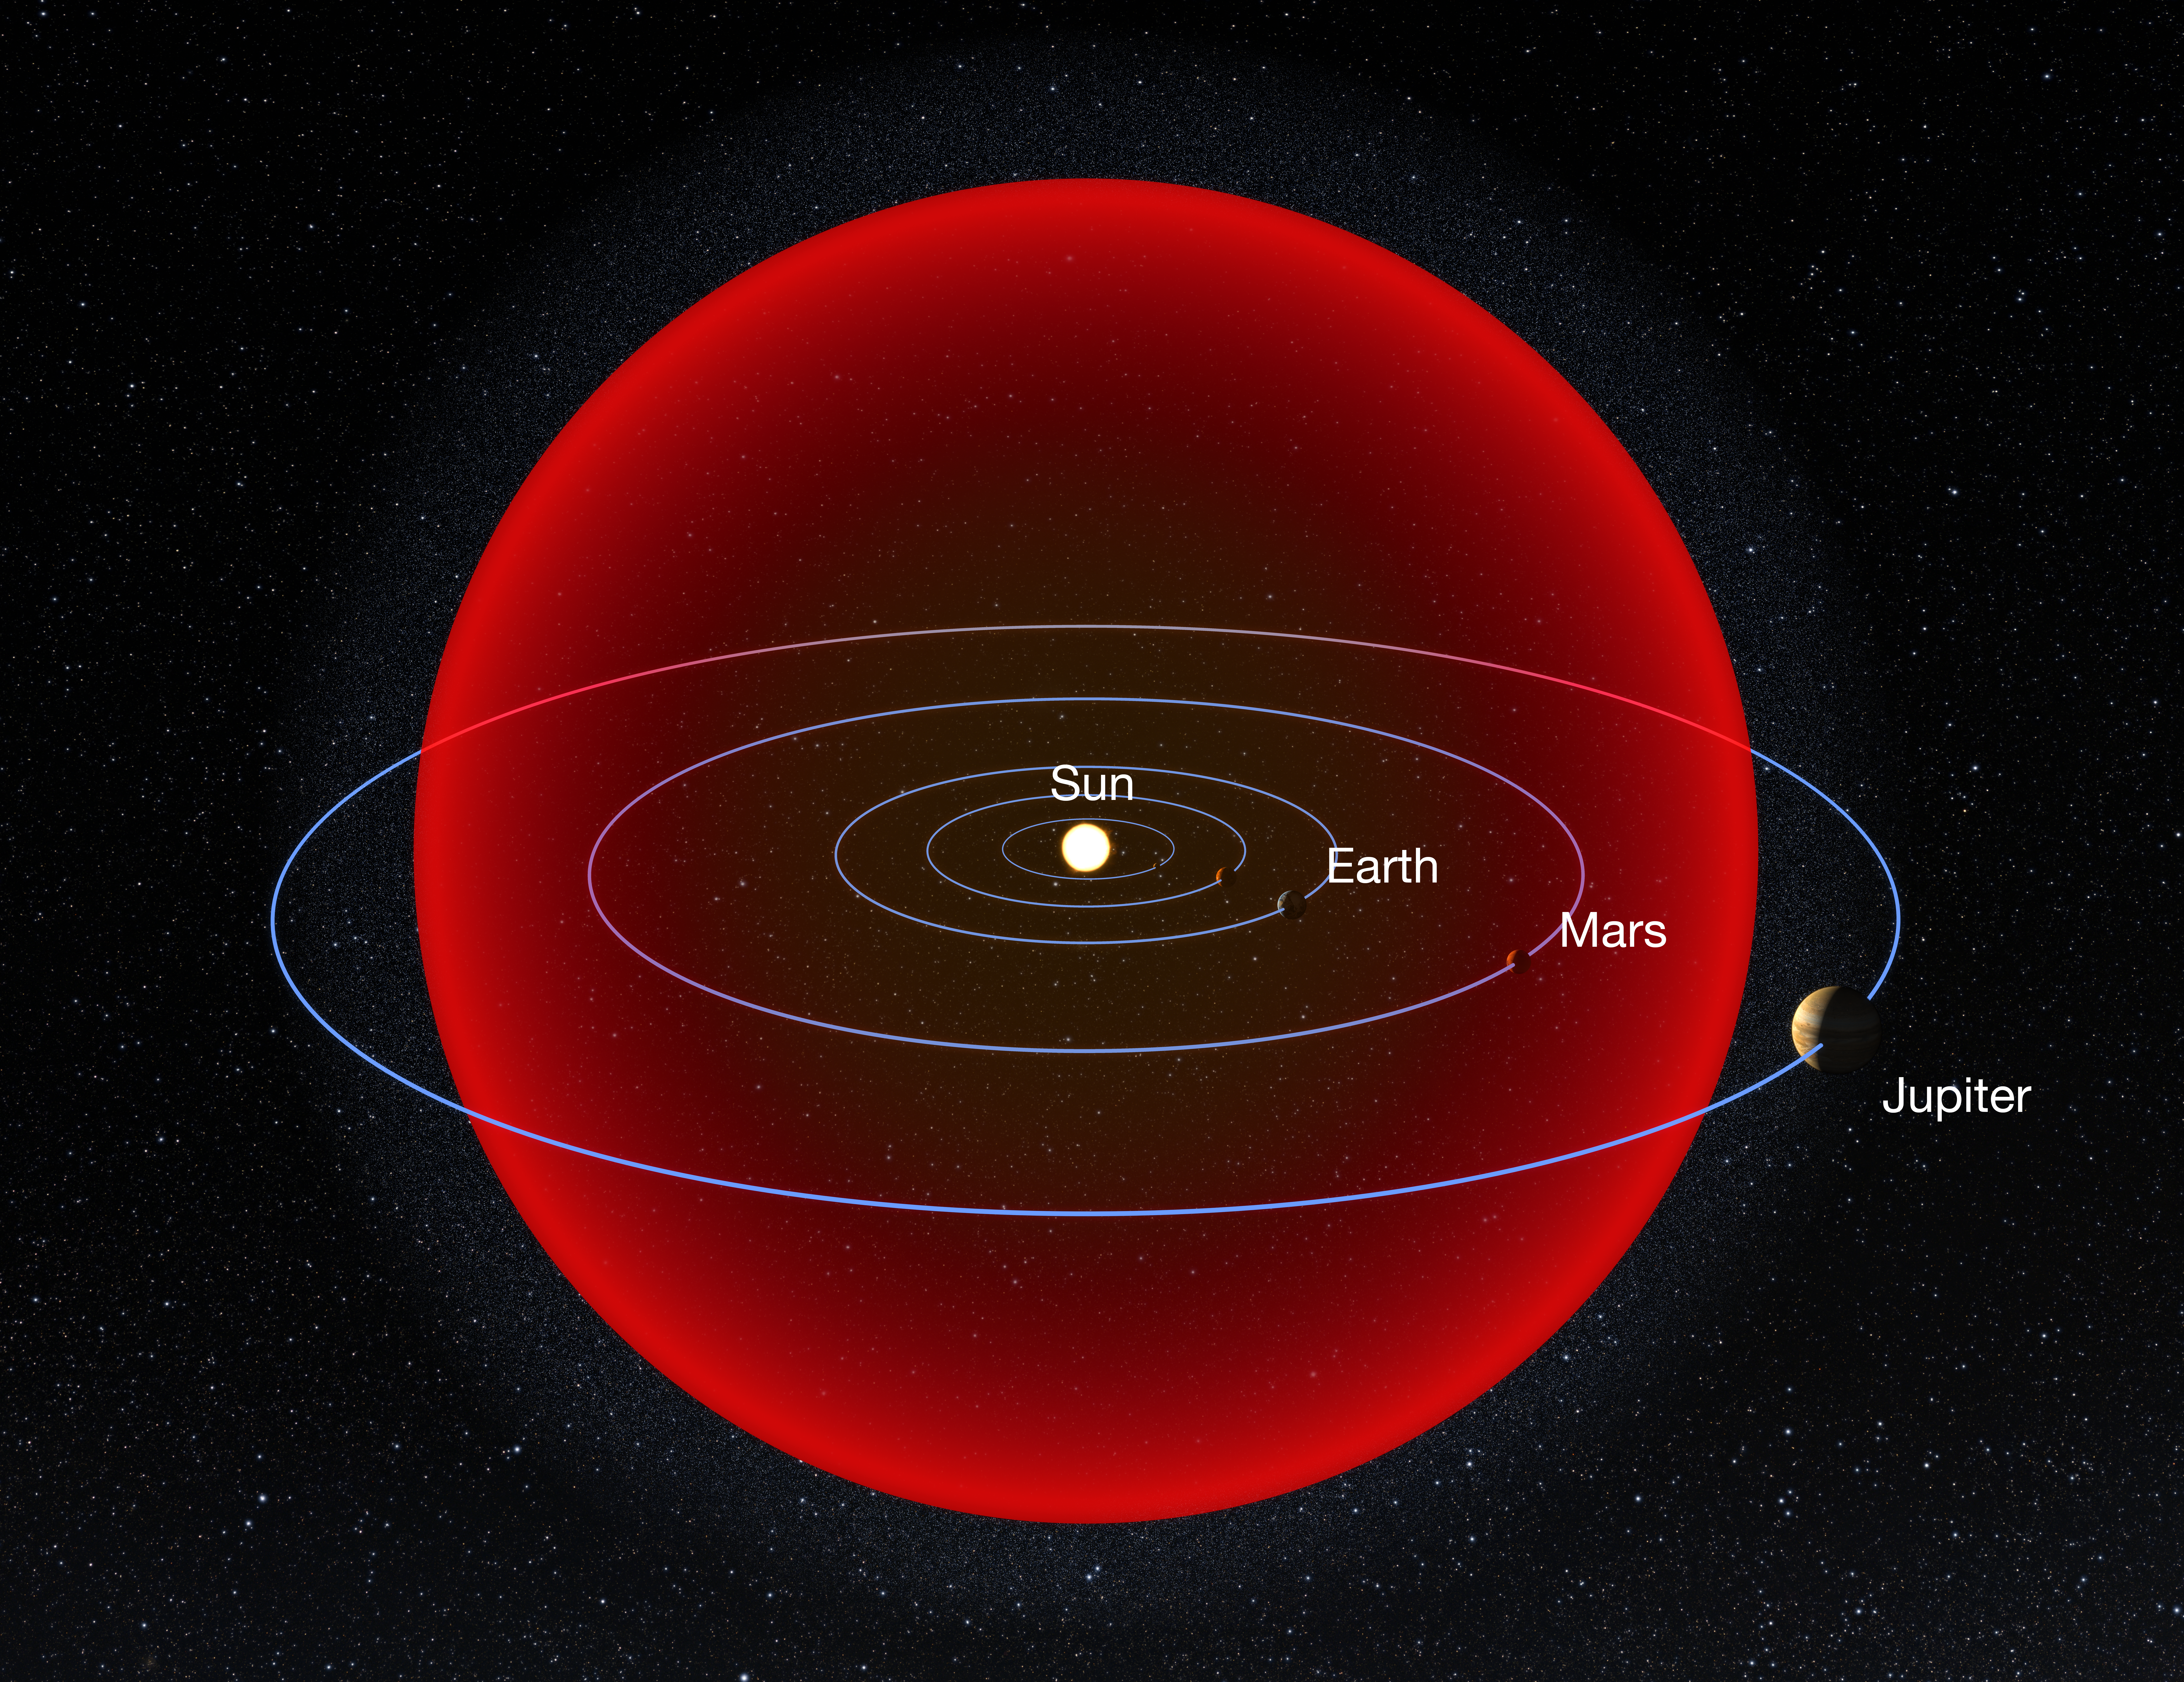

Size of V838 Mono relative to Solar System

Diagram showing a comparison between the size of star V838 Monocerotis at its fullest and our Solar System.

Credit: NASA/ESA and A. Feild (STScI).